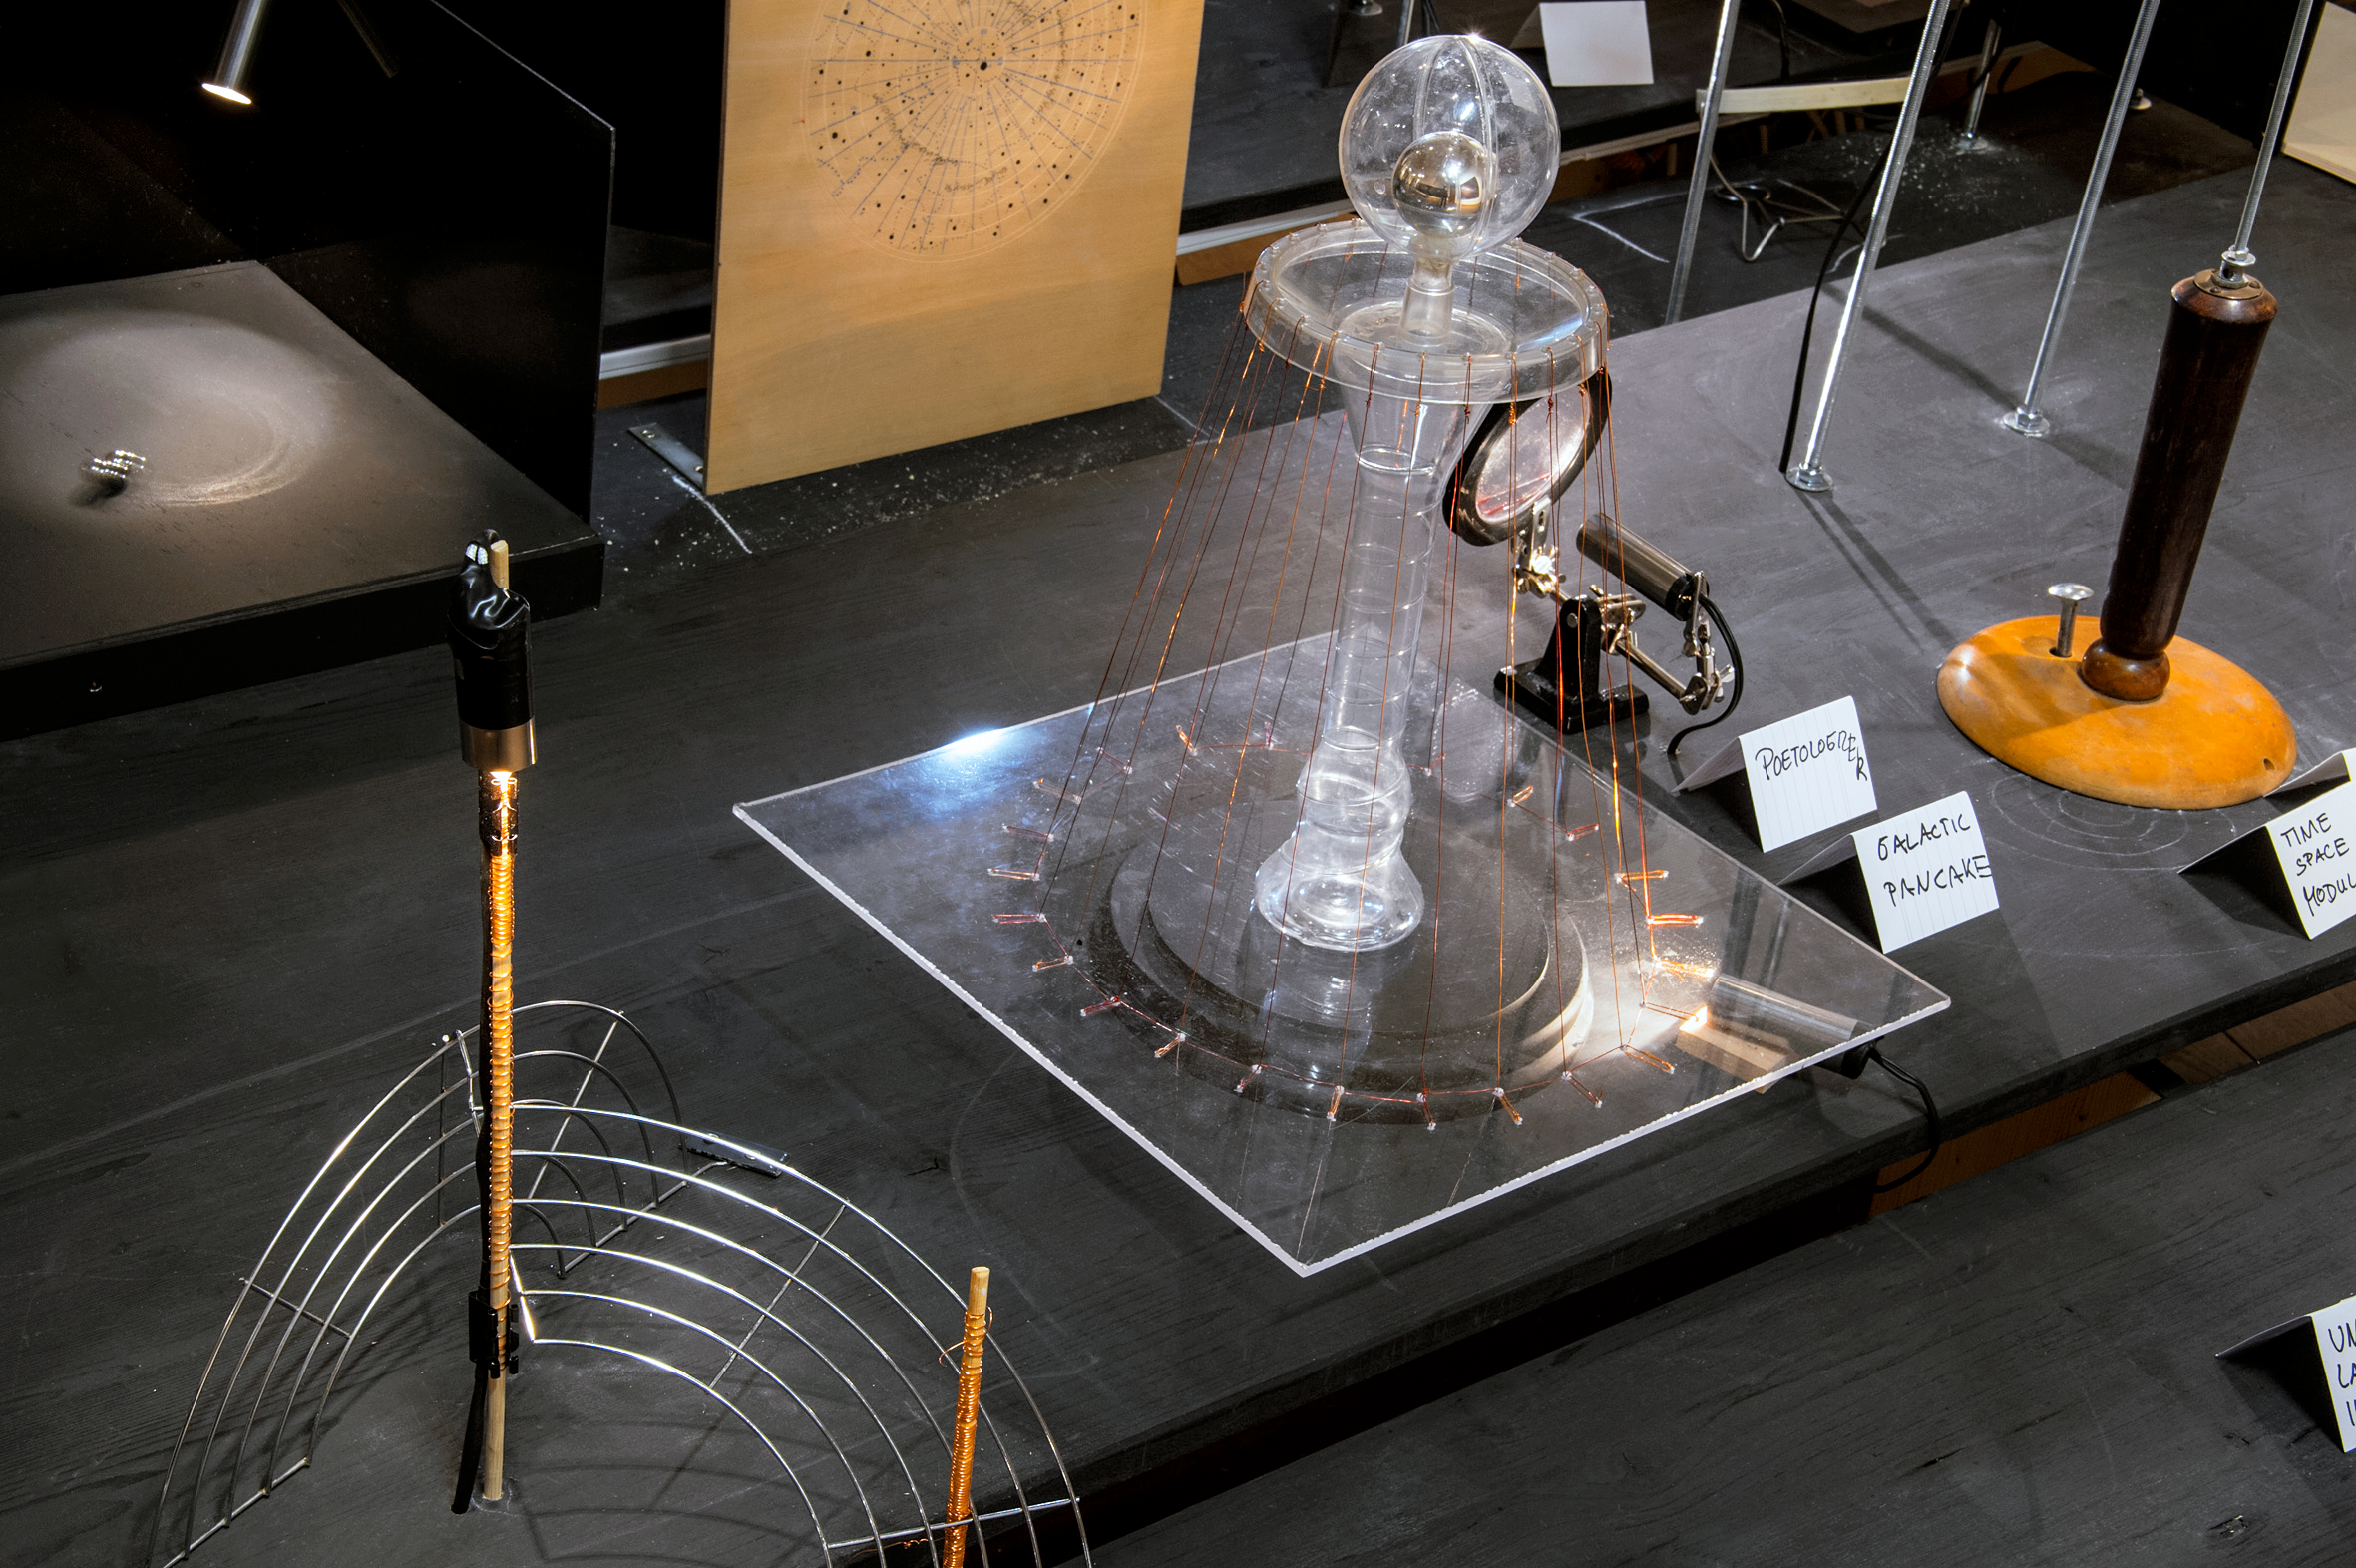

Our Place in Space — The Mirrored Universe

In the installation The Mirrored Universe artists Margit Busch and Solmaz Farhang construct a scenario in which a person has disappeared in a completely inexplicable way. Only a mysterious room, a small strange laboratory filled with strange equipment, was left behind. The only indication of what could have happened are measurements of unusual disturbances of electromagnetic waves in the centre of Vienna. The installation invites visitors to engage in the fictional story of this person, who apparently worked on nothing less than a reconstruction of the Universe: The investigators have recovered some of the instruments in the abandoned laboratory and are now trying to make sense of what they found. The results of these speculations are on display.

The installation was created for the Hubble travelling exhibition Our Place in Space in Vienna.

Credit: NHM Wien, Kurt Kracher